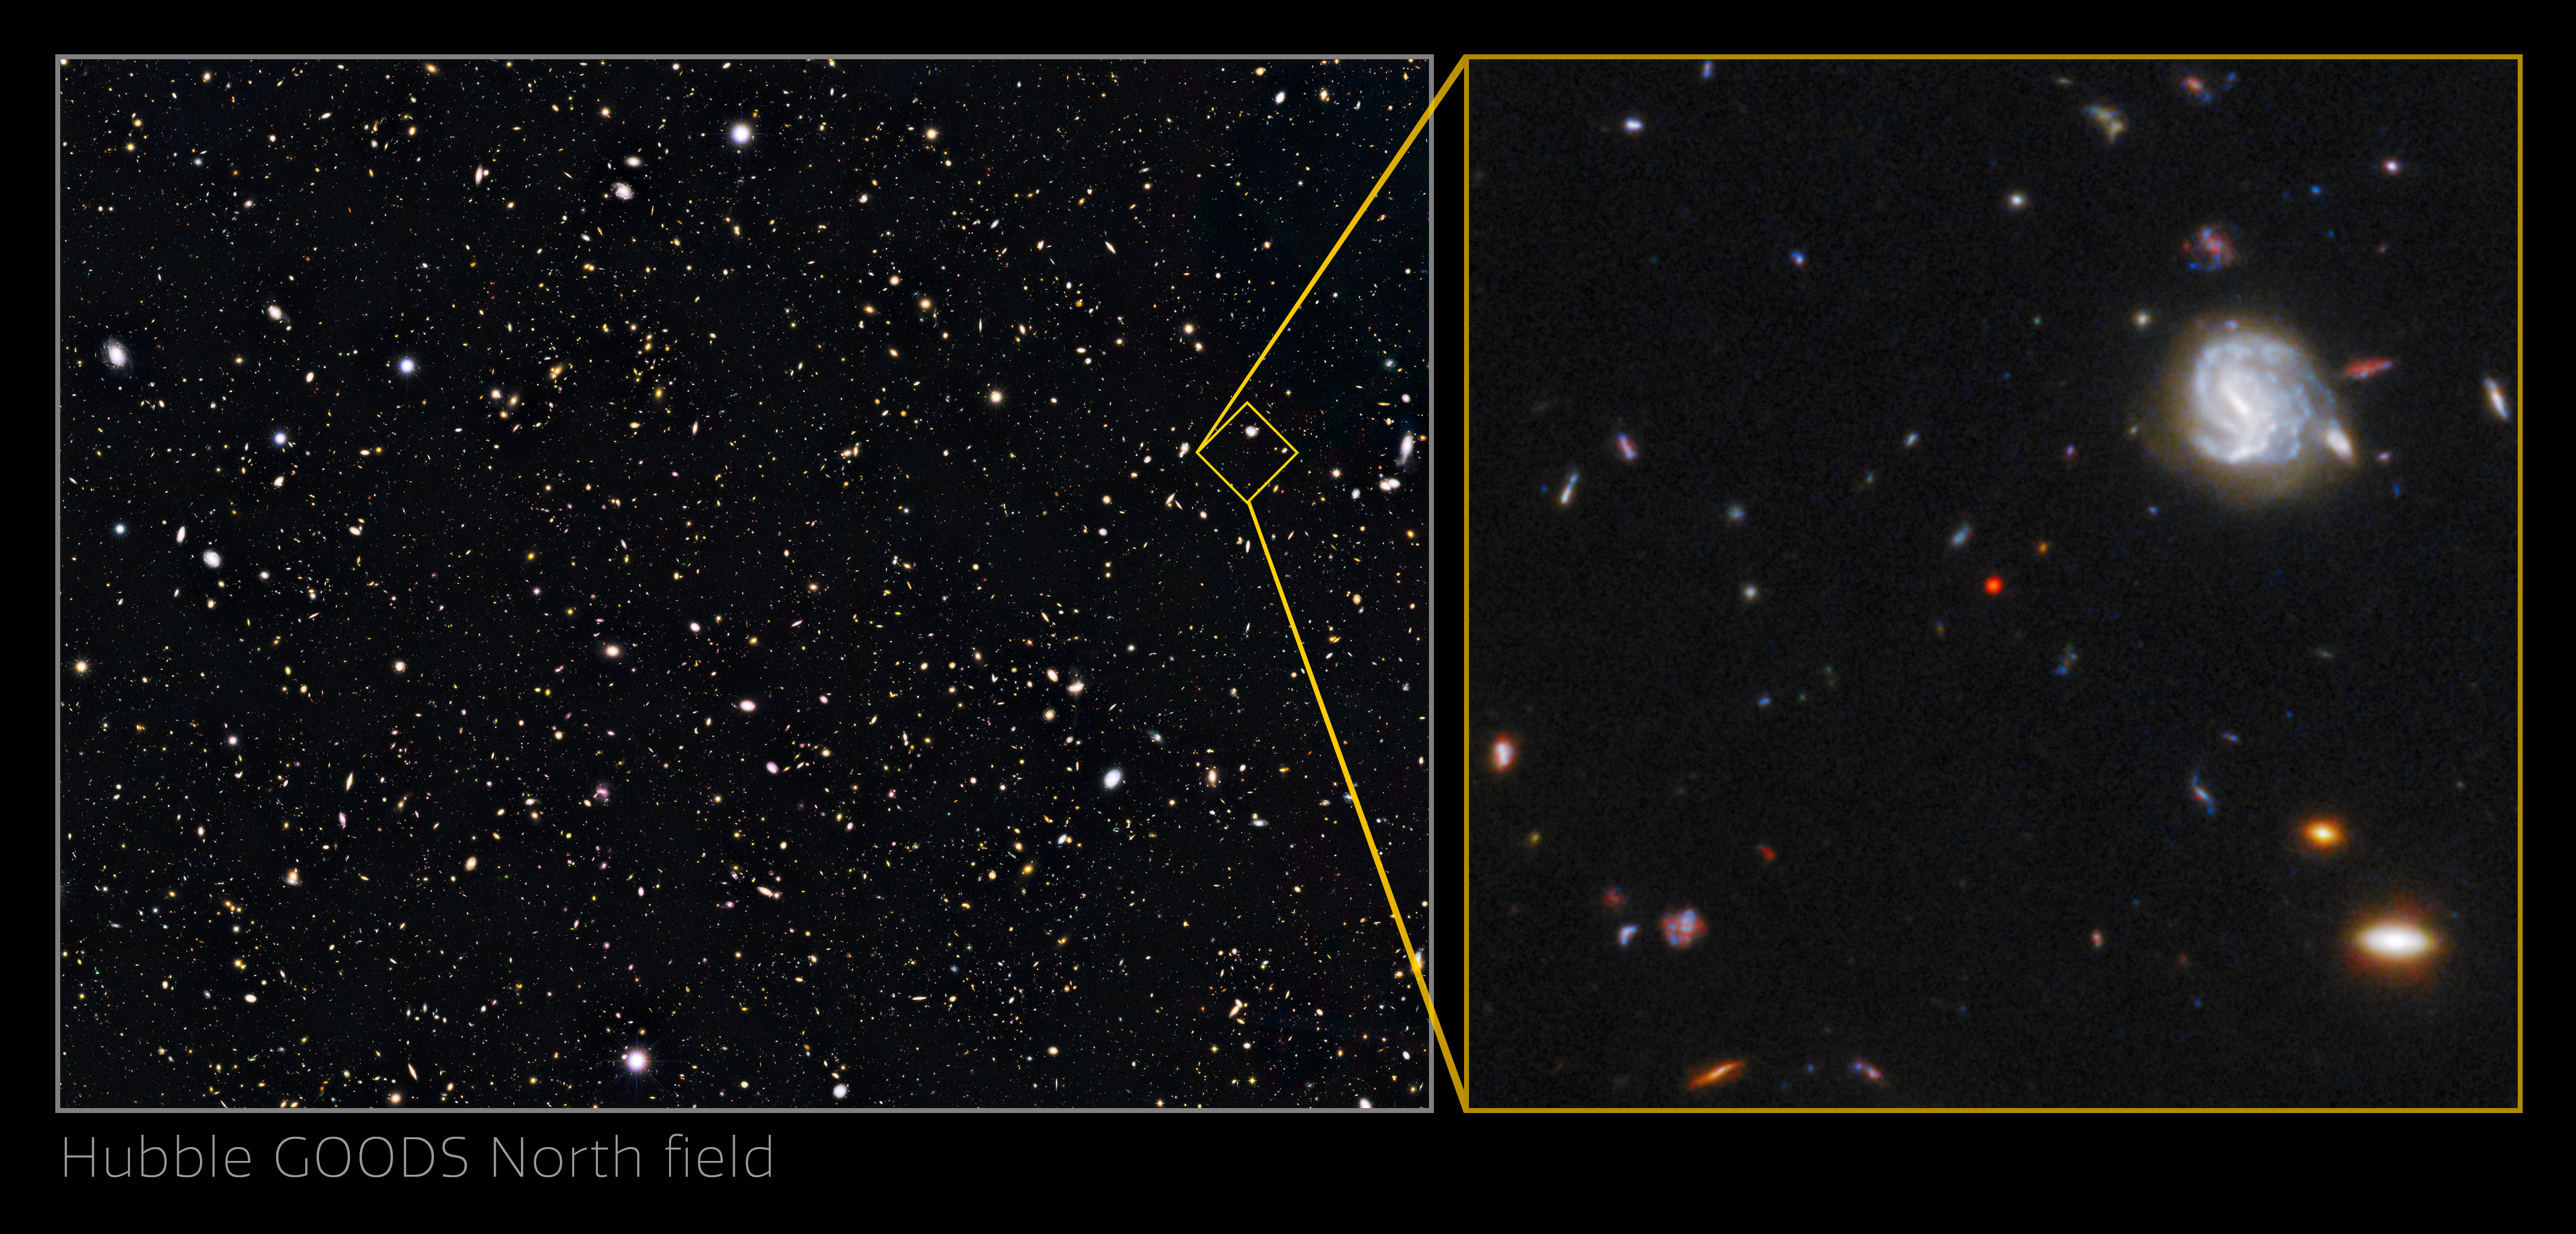

Crop of the GNz7q in the Hubble GOODS-North field

An international team of astronomers using archival data from the NASA/ESA Hubble Space Telescope and other space- and ground-based observatories have discovered a unique object in the distant, early Universe that is a crucial link between young star-forming galaxies and the earliest supermassive black holes. This object is the first of its kind to be discovered so early in the Universe’s history, and had been lurking unnoticed in one of the best-studied areas of the night sky.

The object, which is referred to as GNz7q, is shown here in the centre of the image of the Hubble GOODS-North field.

Credit: NASA, ESA, G. Illingworth (University of California, Santa Cruz), P. Oesch (University of California, Santa Cruz; Yale University), R. Bouwens and I. Labbé (Leiden University), and the Science Team, S. Fujimoto et al. (Cosmic Dawn Center [DAWN] and University of Copenhagen)